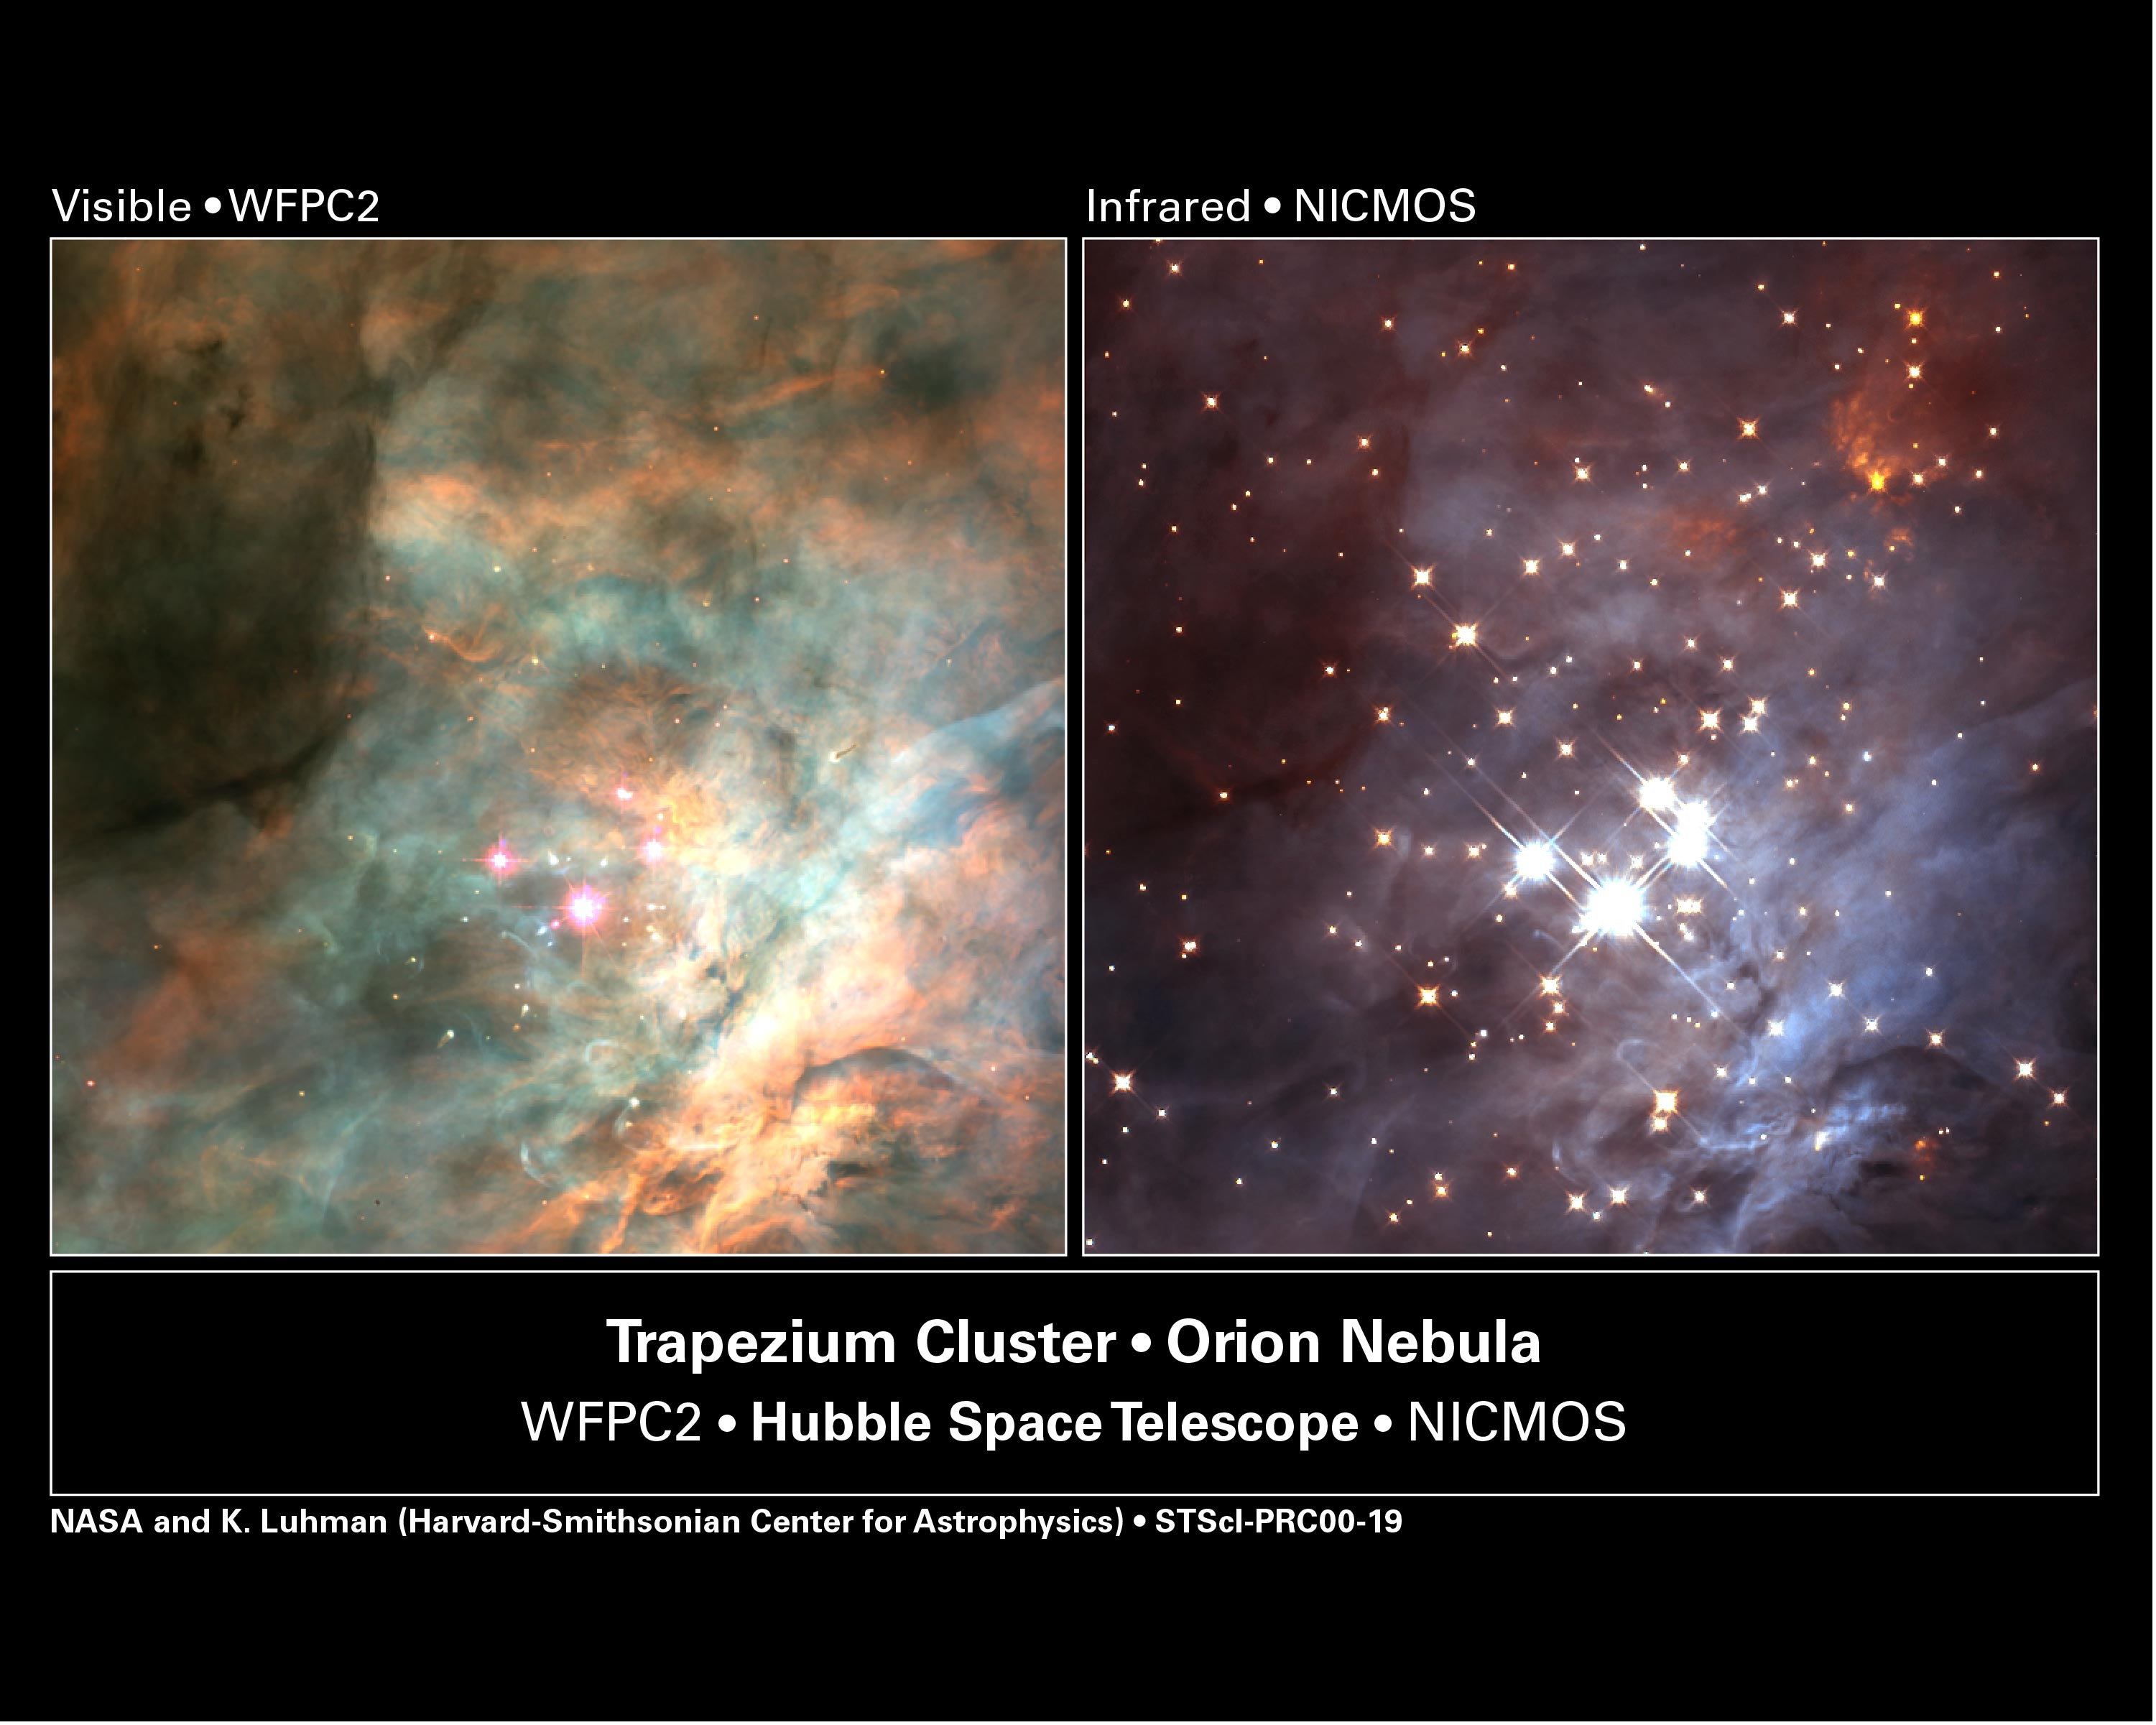

Trapezium Cluster in the Orion Nebula

Left Image

The brown dwarfs are too dim to be seen in a visible-light image taken by the Hubble telescope's Wide Field and Planetary Camera 2. This view also doesn't show the assemblage of infant stars seen in the near-infrared image.

Credit: K.L.Luhman(Harvard-Smithsonian Center for Astrophysics, Cambridge, Mass.);and G.Schneider, E.Young, G.Rieke, A.Cotera, H.Chen, M.Rieke, R.Thompson(Steward Observatory, University of Arizona, Tucson, Ariz.)C.R.O'Dell and S.K.Wong(Rice University) and NASA/ESA